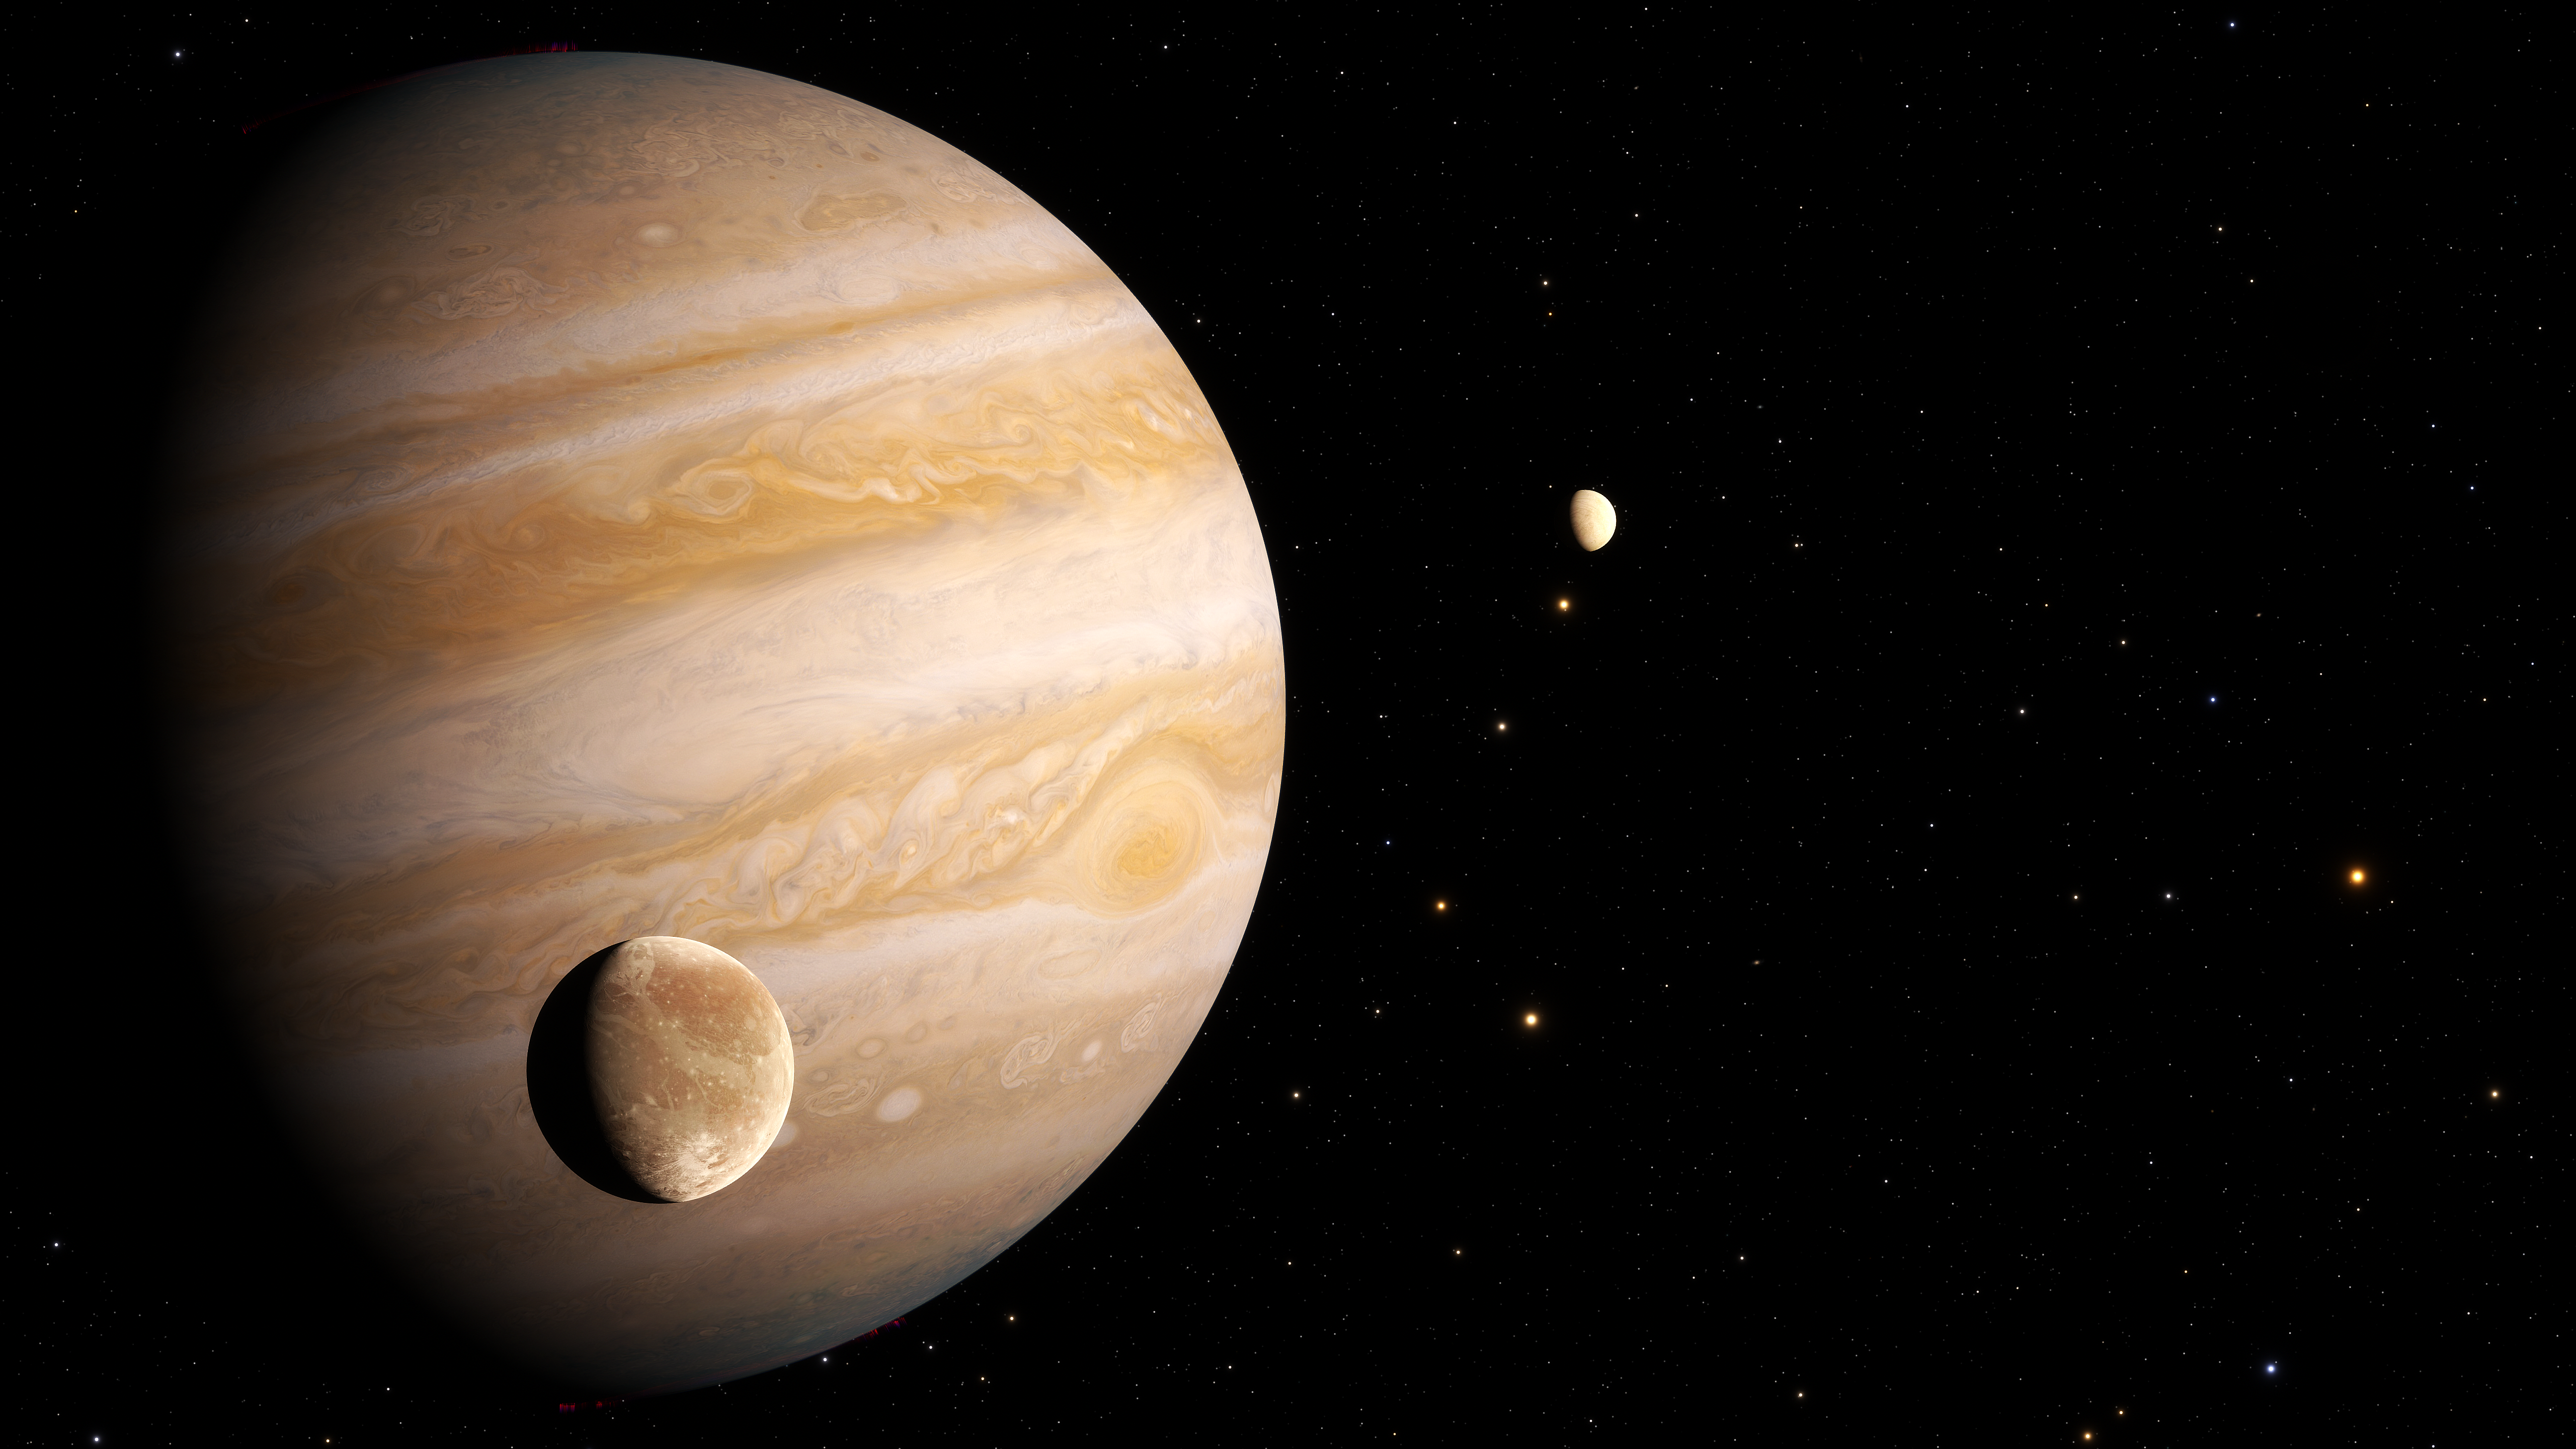

Artist’s Impression of Ganymede

This image presents an artist’s impression of Jupiter’s moon Ganymede.

Astronomers have used archival datasets from the NASA/ESA Hubble Space Telescope to reveal the first evidence for water vapour in the atmosphere of Jupiter’s moon Ganymede, the result of the thermal escape of water vapour from the moon’s icy surface.

Credit: ESA/Hubble, J. daSilva